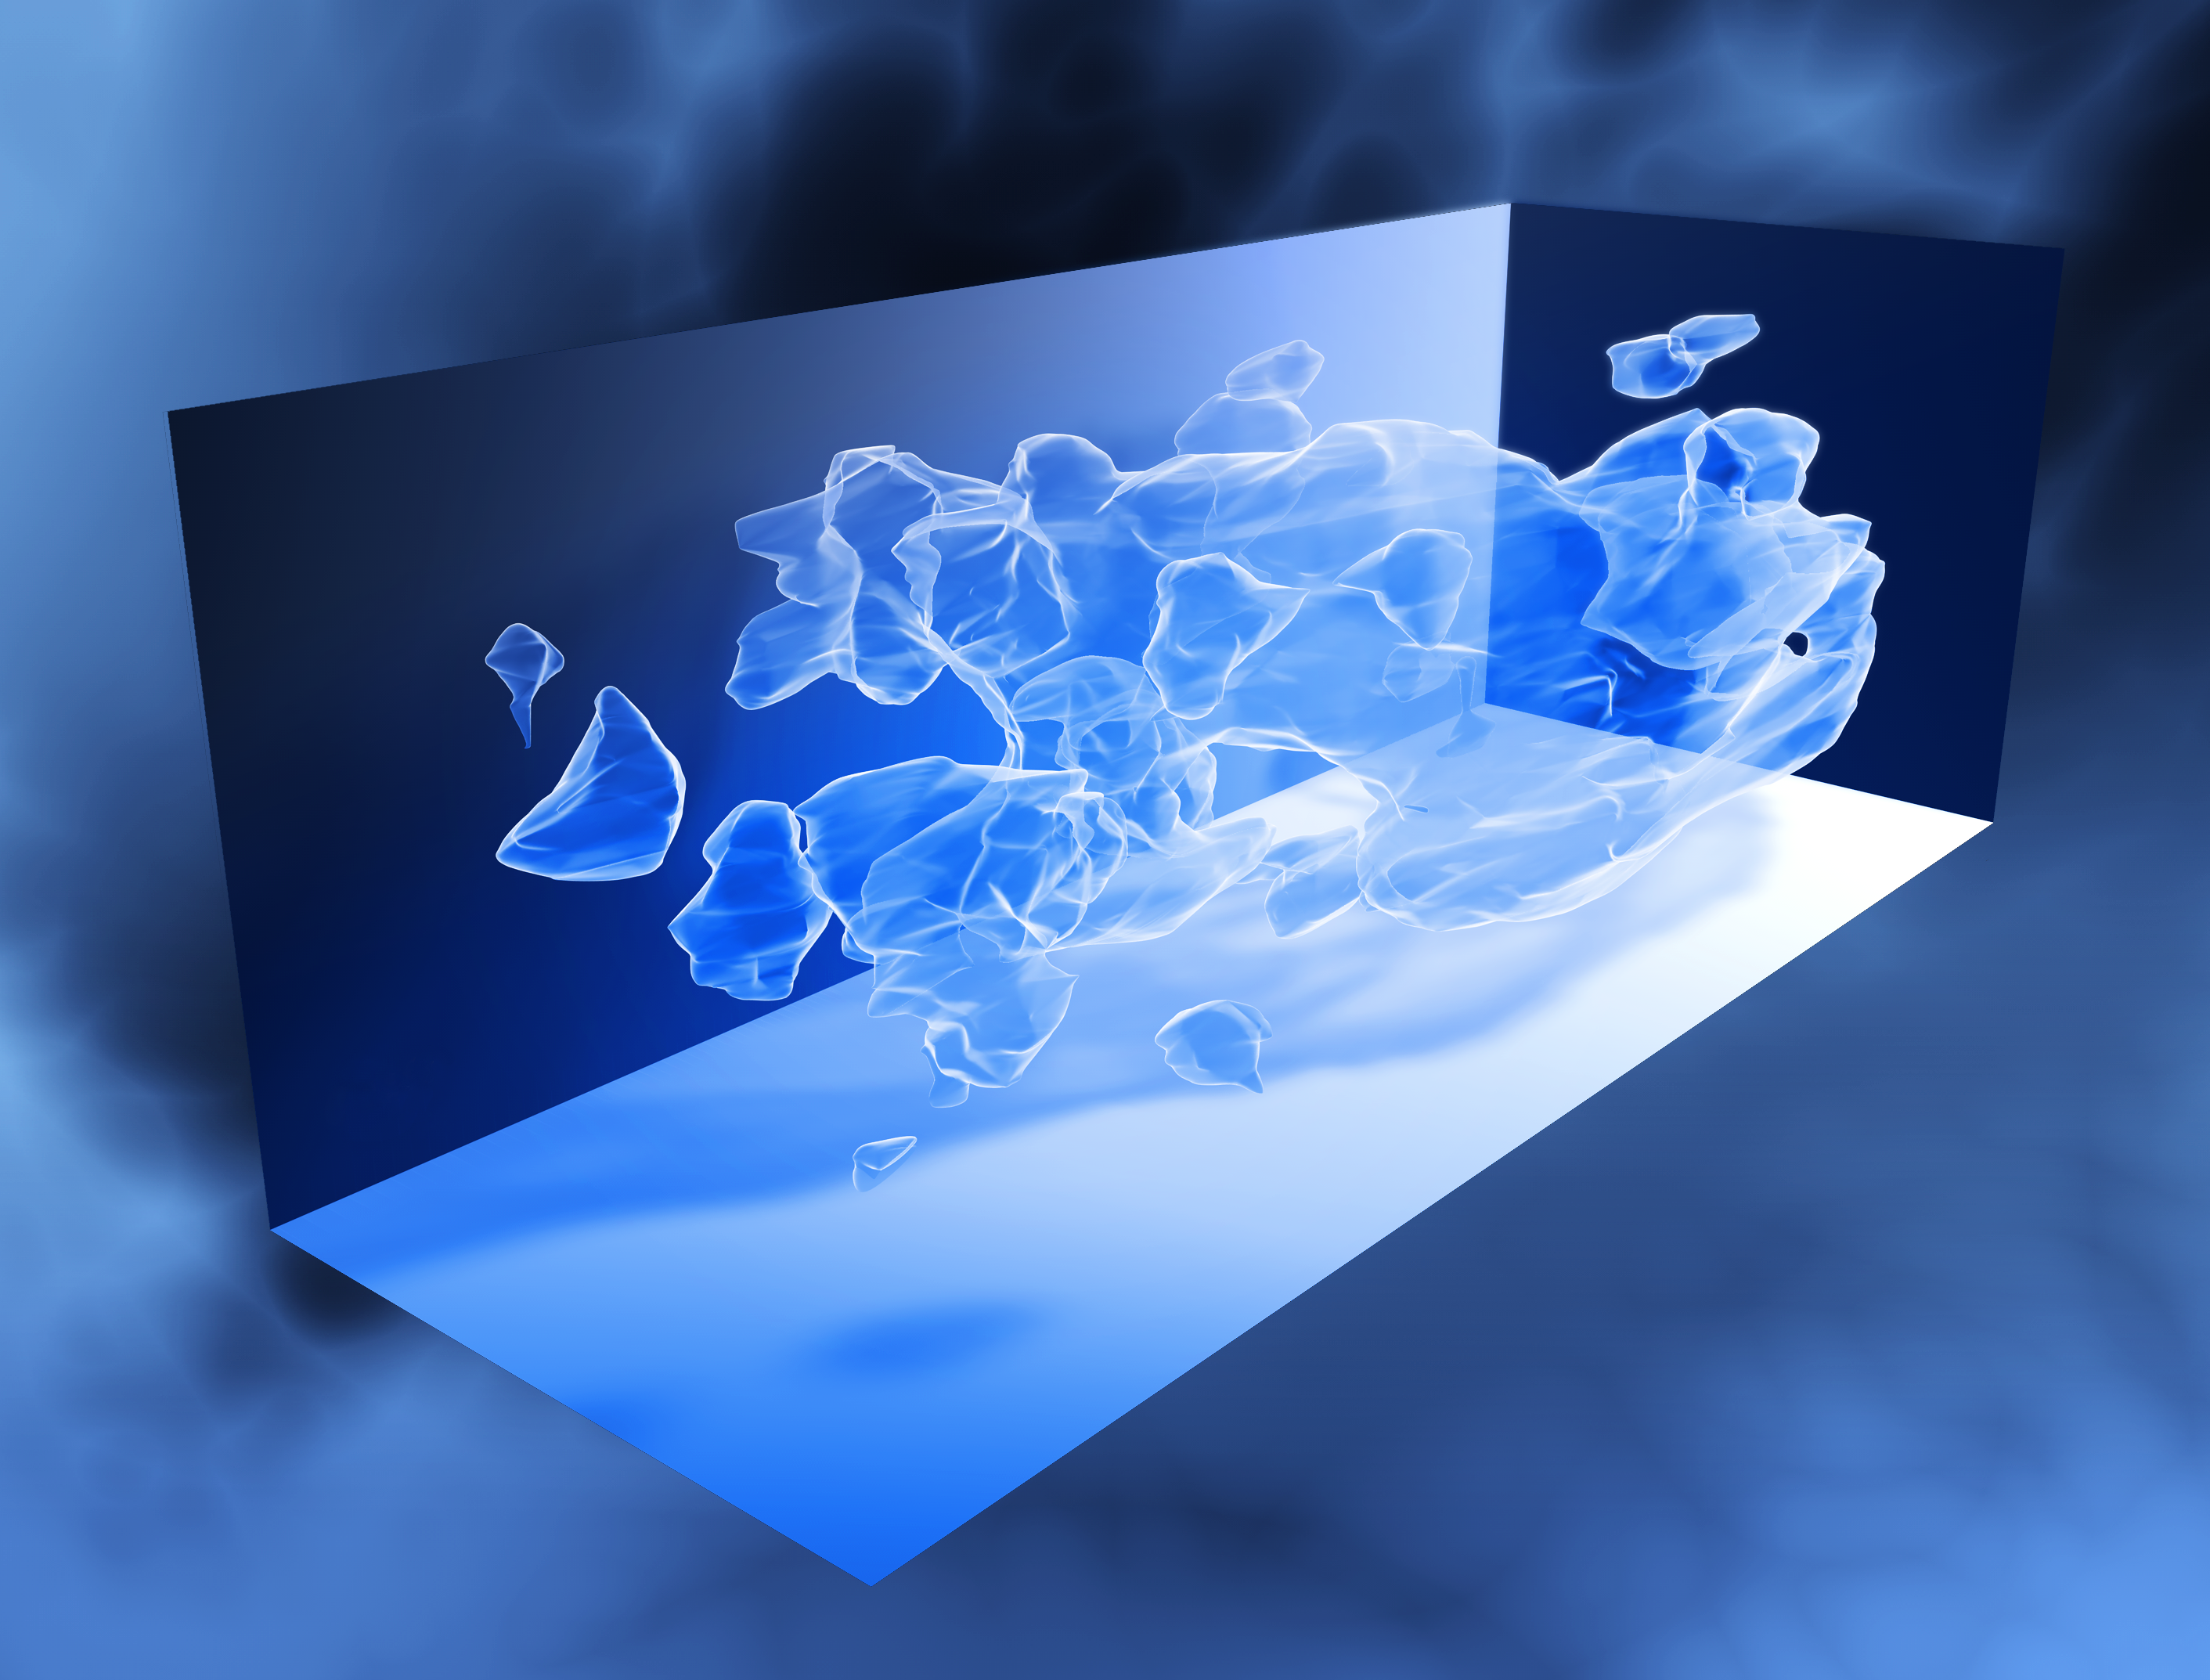

Three-dimensional distribution of dark matter in the Universe (artist's impression)

This three-dimensional map offers a first look at the web-like large-scale distribution of dark matter, an invisible form of matter that accounts for most of the Universe's mass.

The map reveals a loose network of dark matter filaments, gradually collapsing under the relentless pull of gravity, and growing clumpier over time.

The three axes of the box correspond to sky position (in right ascension and declination), and distance from the Earth increasing from left to right (as measured by cosmological redshift). Note how the clumping of the dark matter becomes more pronounced, moving right to left across the volume map, from the early Universe to the more recent Universe.

Credit: NASA, ESA and R. Massey (California Institute of Technology)